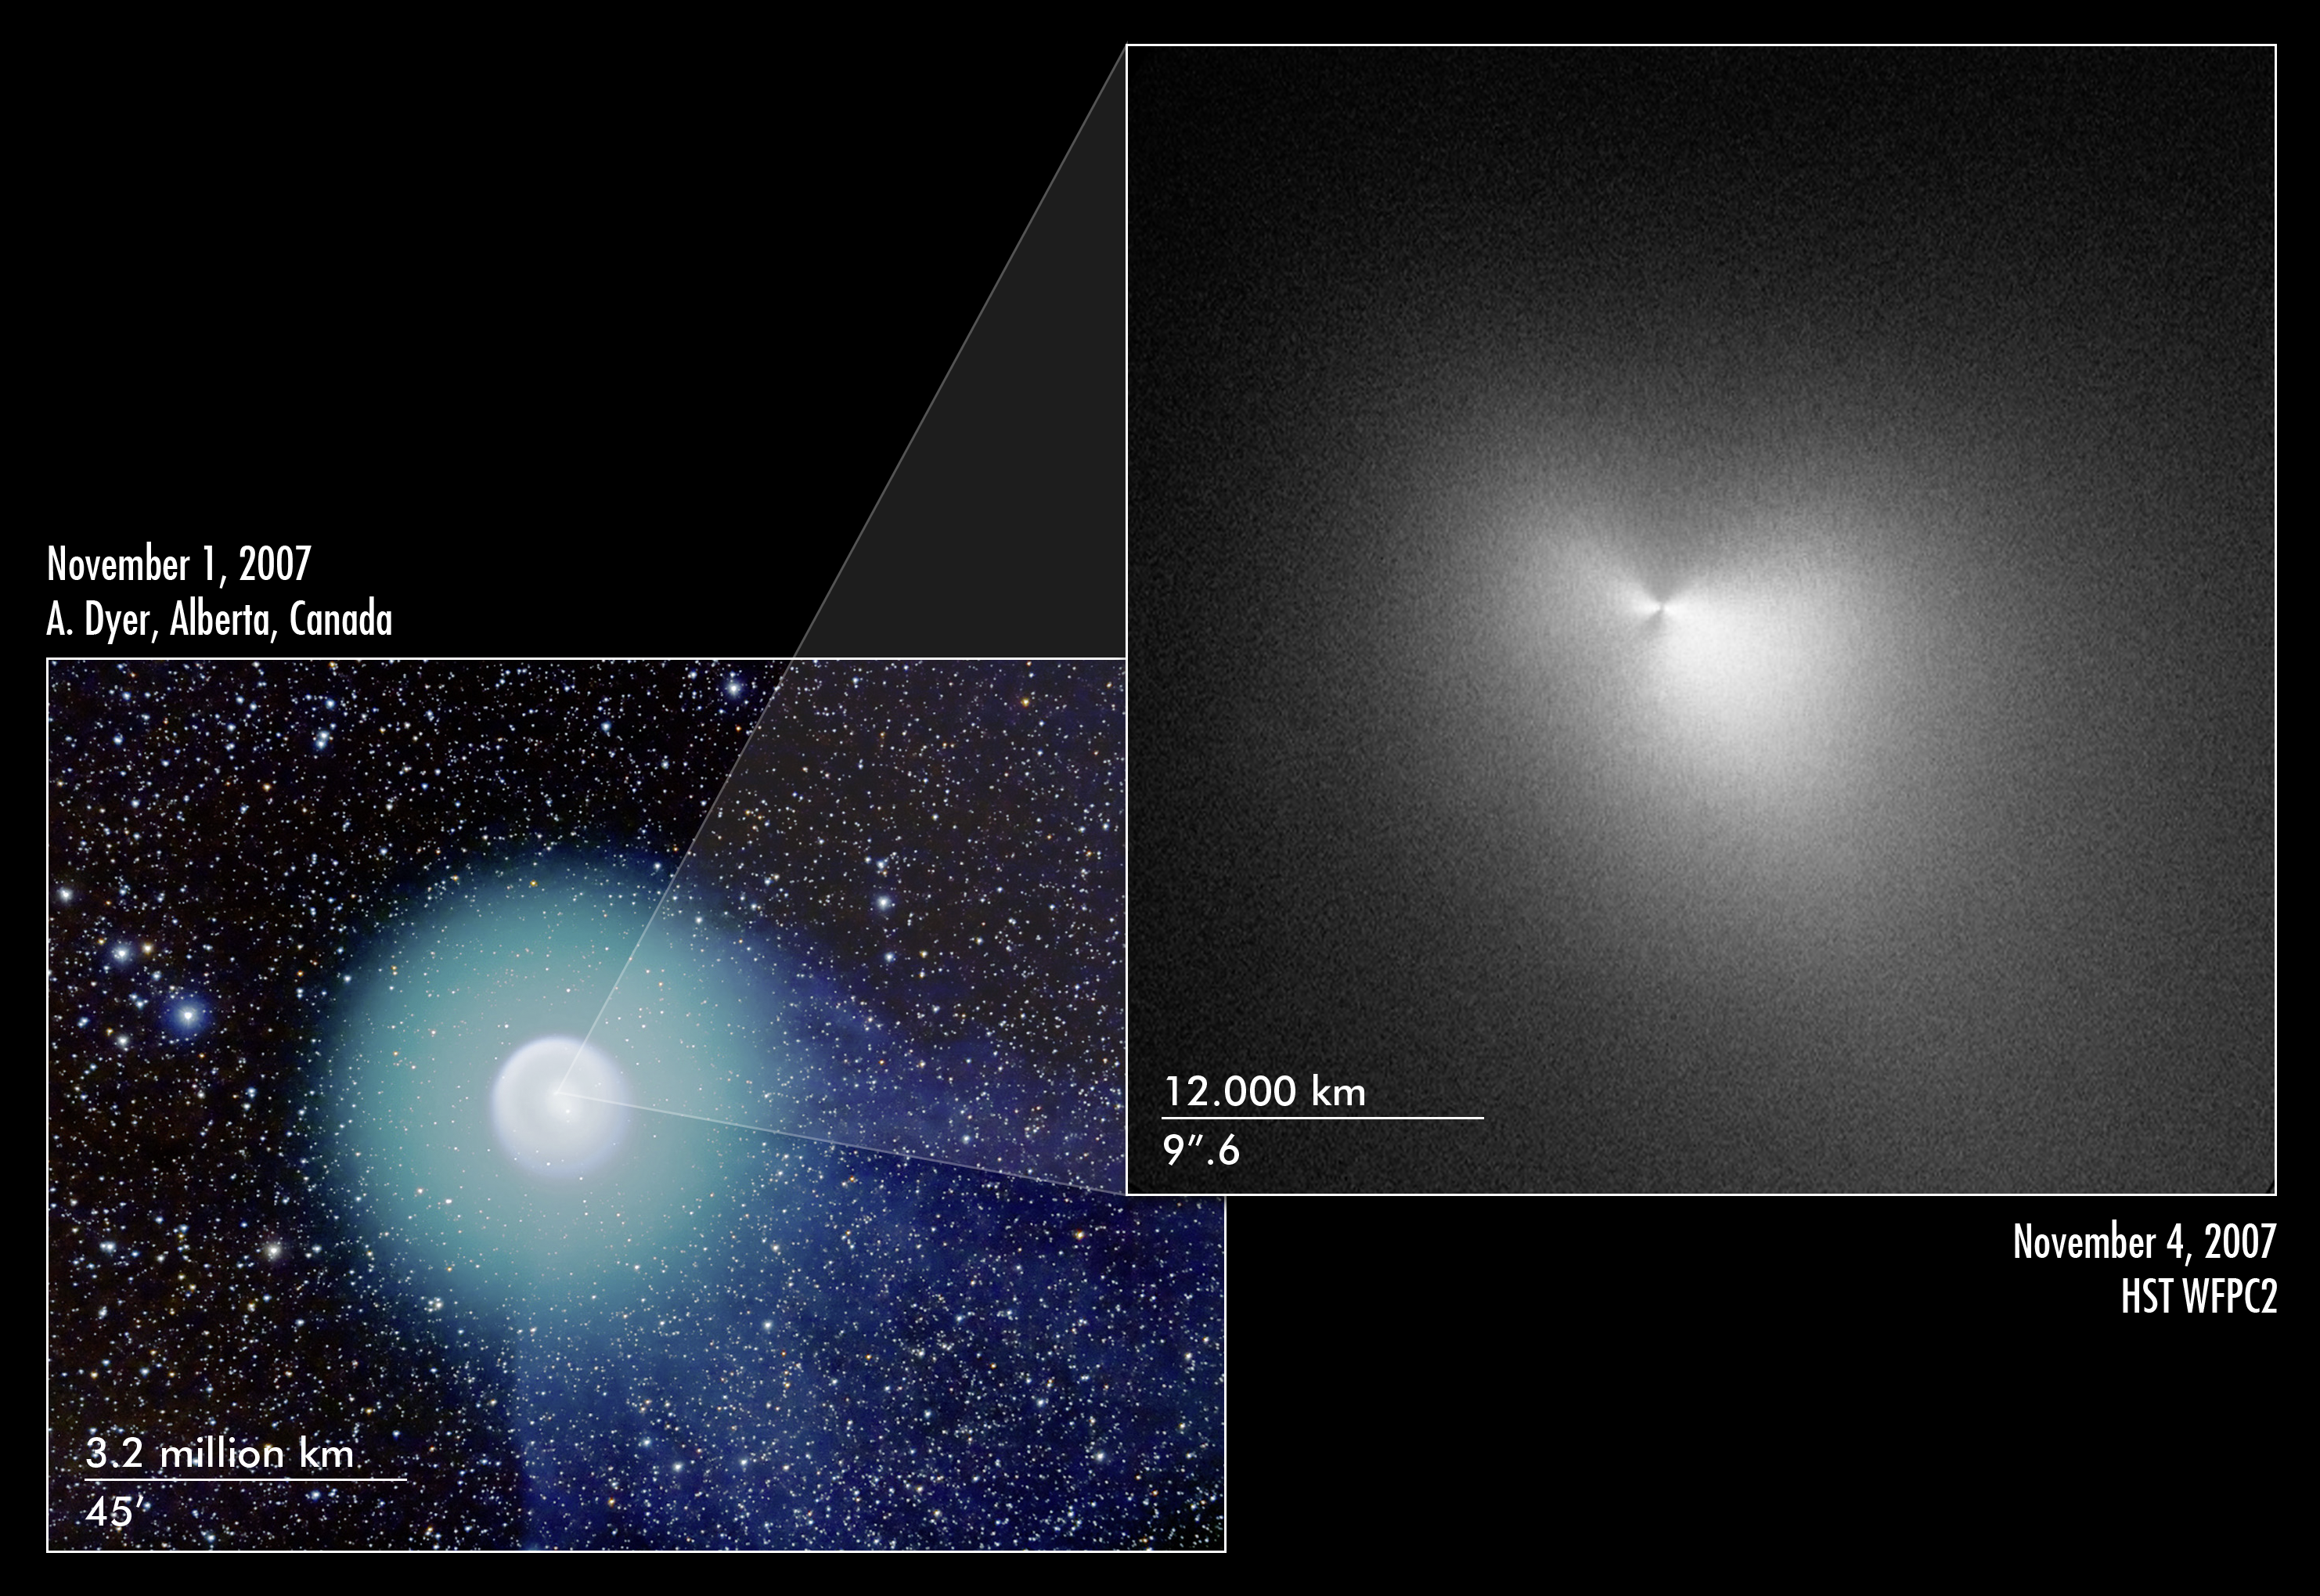

Hubble and wide-field ground based view of Comet 17P/Holmes

The Hubble image at right, taken on 4 Nov., shows the heart of Comet 17P/Holmes. The central portion of the image has been specially processed to highlight variations in the dust distribution near the nucleus. About twice as much dust lies along the east-west direction (the horizontal direction) as along the north-south direction (the vertical direction), giving the comet a "bow tie" appearance.

The composite colour image at left, taken 1 Nov. by an amateur astronomer shows the complex structure of the entire coma, consisting of concentric shells of dust and a faint tail emanating from the comet's right side.

Credit: NASA,ESA, and H. Weaver (The Johns Hopkins University Applied Physics Laboratory)